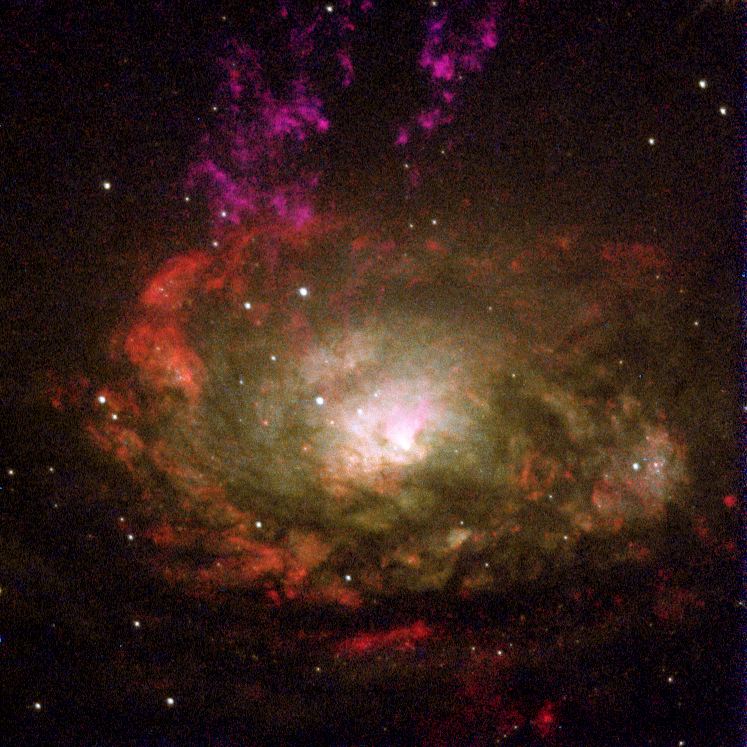

Active galaxy Circinus

Resembling a swirling witch's cauldron of glowing vapors, the black hole-powered core of a nearby active galaxy appears in this colorful NASA/ESA Hubble Space Telescope image. The galaxy lies 13 million light-years away in the southern constellation Circinus.

This galaxy is designated a type 2 Seyfert, a class of mostly spiral galaxies that have compact centers and are believed to contain massive black holes. Seyfert galaxies are themselves part of a larger class of objects called Active Galactic Nuclei or AGN. AGN have the ability to remove gas from the centers of their galaxies by blowing it out into space at phenomenal speeds. Astronomers studying the Circinus galaxy are seeing evidence of a powerful AGN at the center of this galaxy as well.

Credit: Andrew S. Wilson (University of Maryland); Patrick L. Shopbell (Caltech); Chris Simpson (Subaru Telescope); Thaisa Storchi-Bergmann and F. K. B. Barbosa (UFRGS, Brazil); and Martin J. Ward (University of Leicester, U.K.) and NASA/ESA